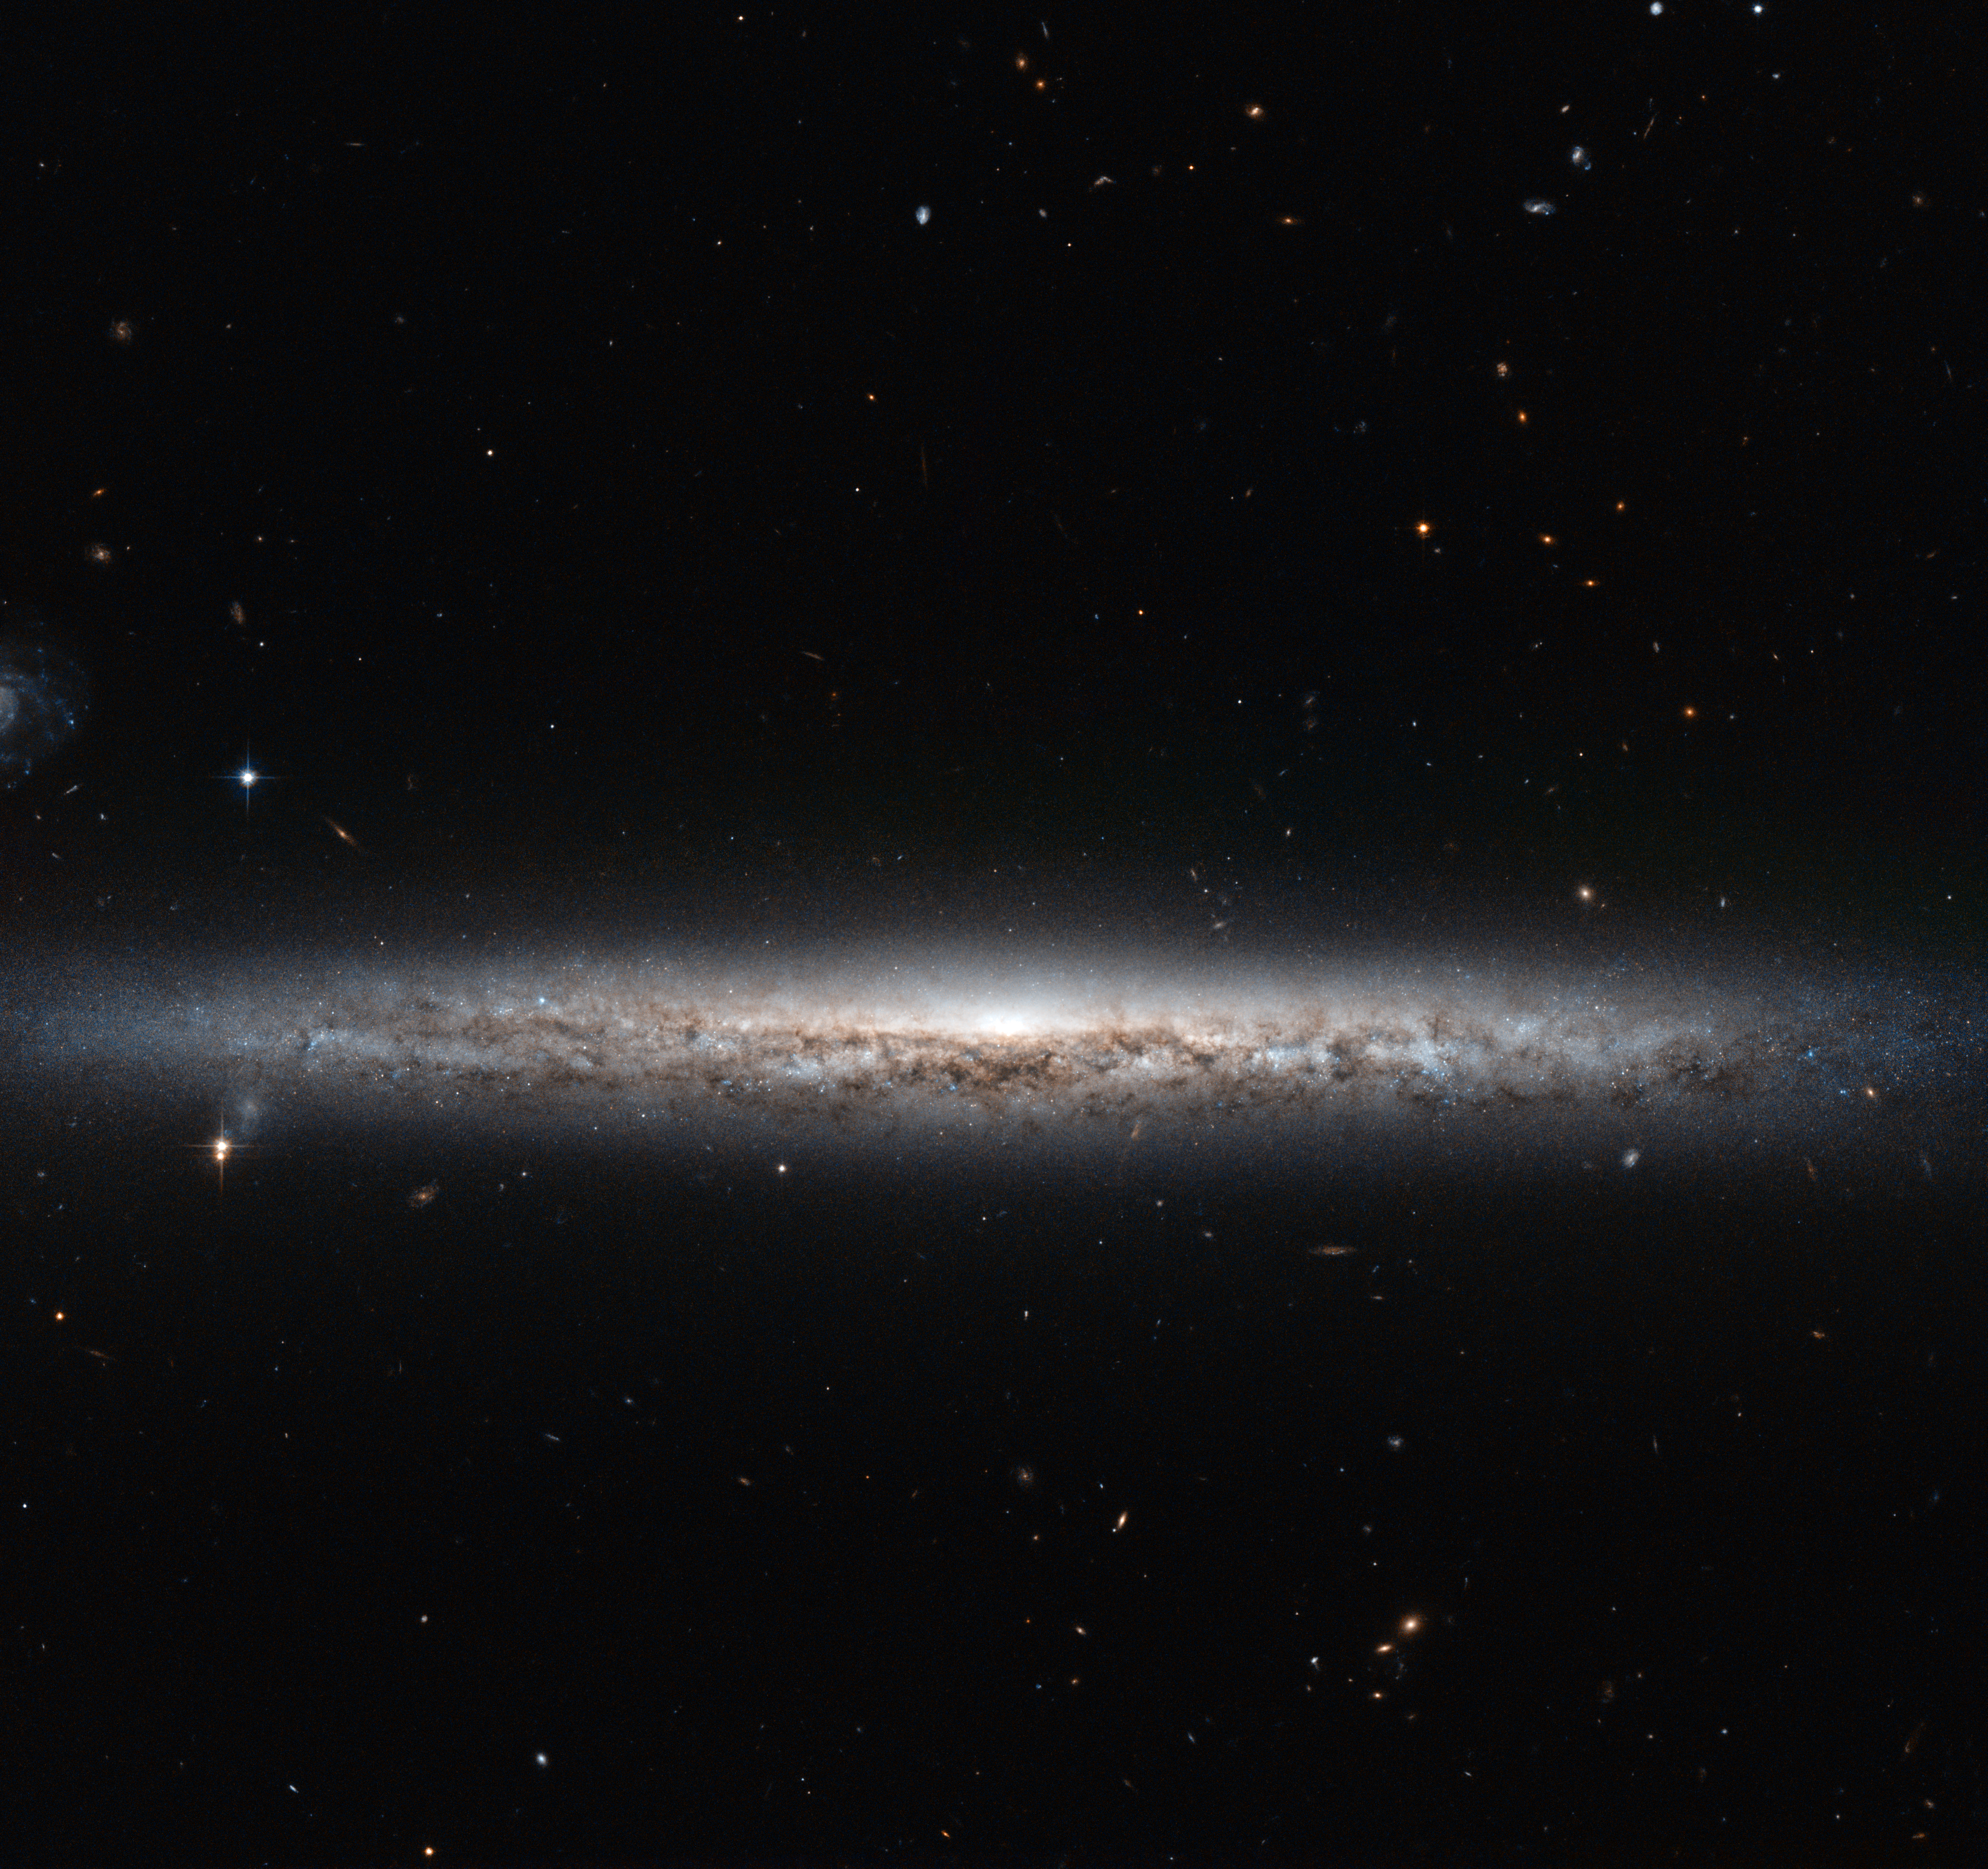

A slice of stars

The thin, glowing streak slicing across this image cuts a lonely figure, with only a few foreground stars and galaxies in the distant background for company.

However, this is all a case of perspective; lying out of frame is another nearby spiral. Together, these two galaxies make up a pair, moving through space together and keeping one another company.

The subject of this Hubble image is called NGC 3501, with NGC 3507 as its out-of-frame companion. The two galaxies look very different — another example of the importance of perspective. NGC 3501 appears edge-on, giving it an elongated and very narrow appearance. Its partner, however, looks very different indeed, appearing face-on and giving us a fantastic view of its barred swirling arms.

While similar arms may not be visible in this image of NGC 3501, this galaxy is also a spiral — although it is somewhat different from its companion. While NGC 3507 has bars cutting through its centre, NGC 3501 does not. Instead, its loosely wound spiral arms all originate from its centre. The bright gas and stars that make up these arms can be seen here glowing brightly, mottled by the dark dust lanes that trace across the galaxy.

A version of this image was entered into the Hubble's Hidden Treasures image processing competition by contestant Nick Rose.

Credit: ESA/Hubble & NASA Acknowledgement: Nick Rose